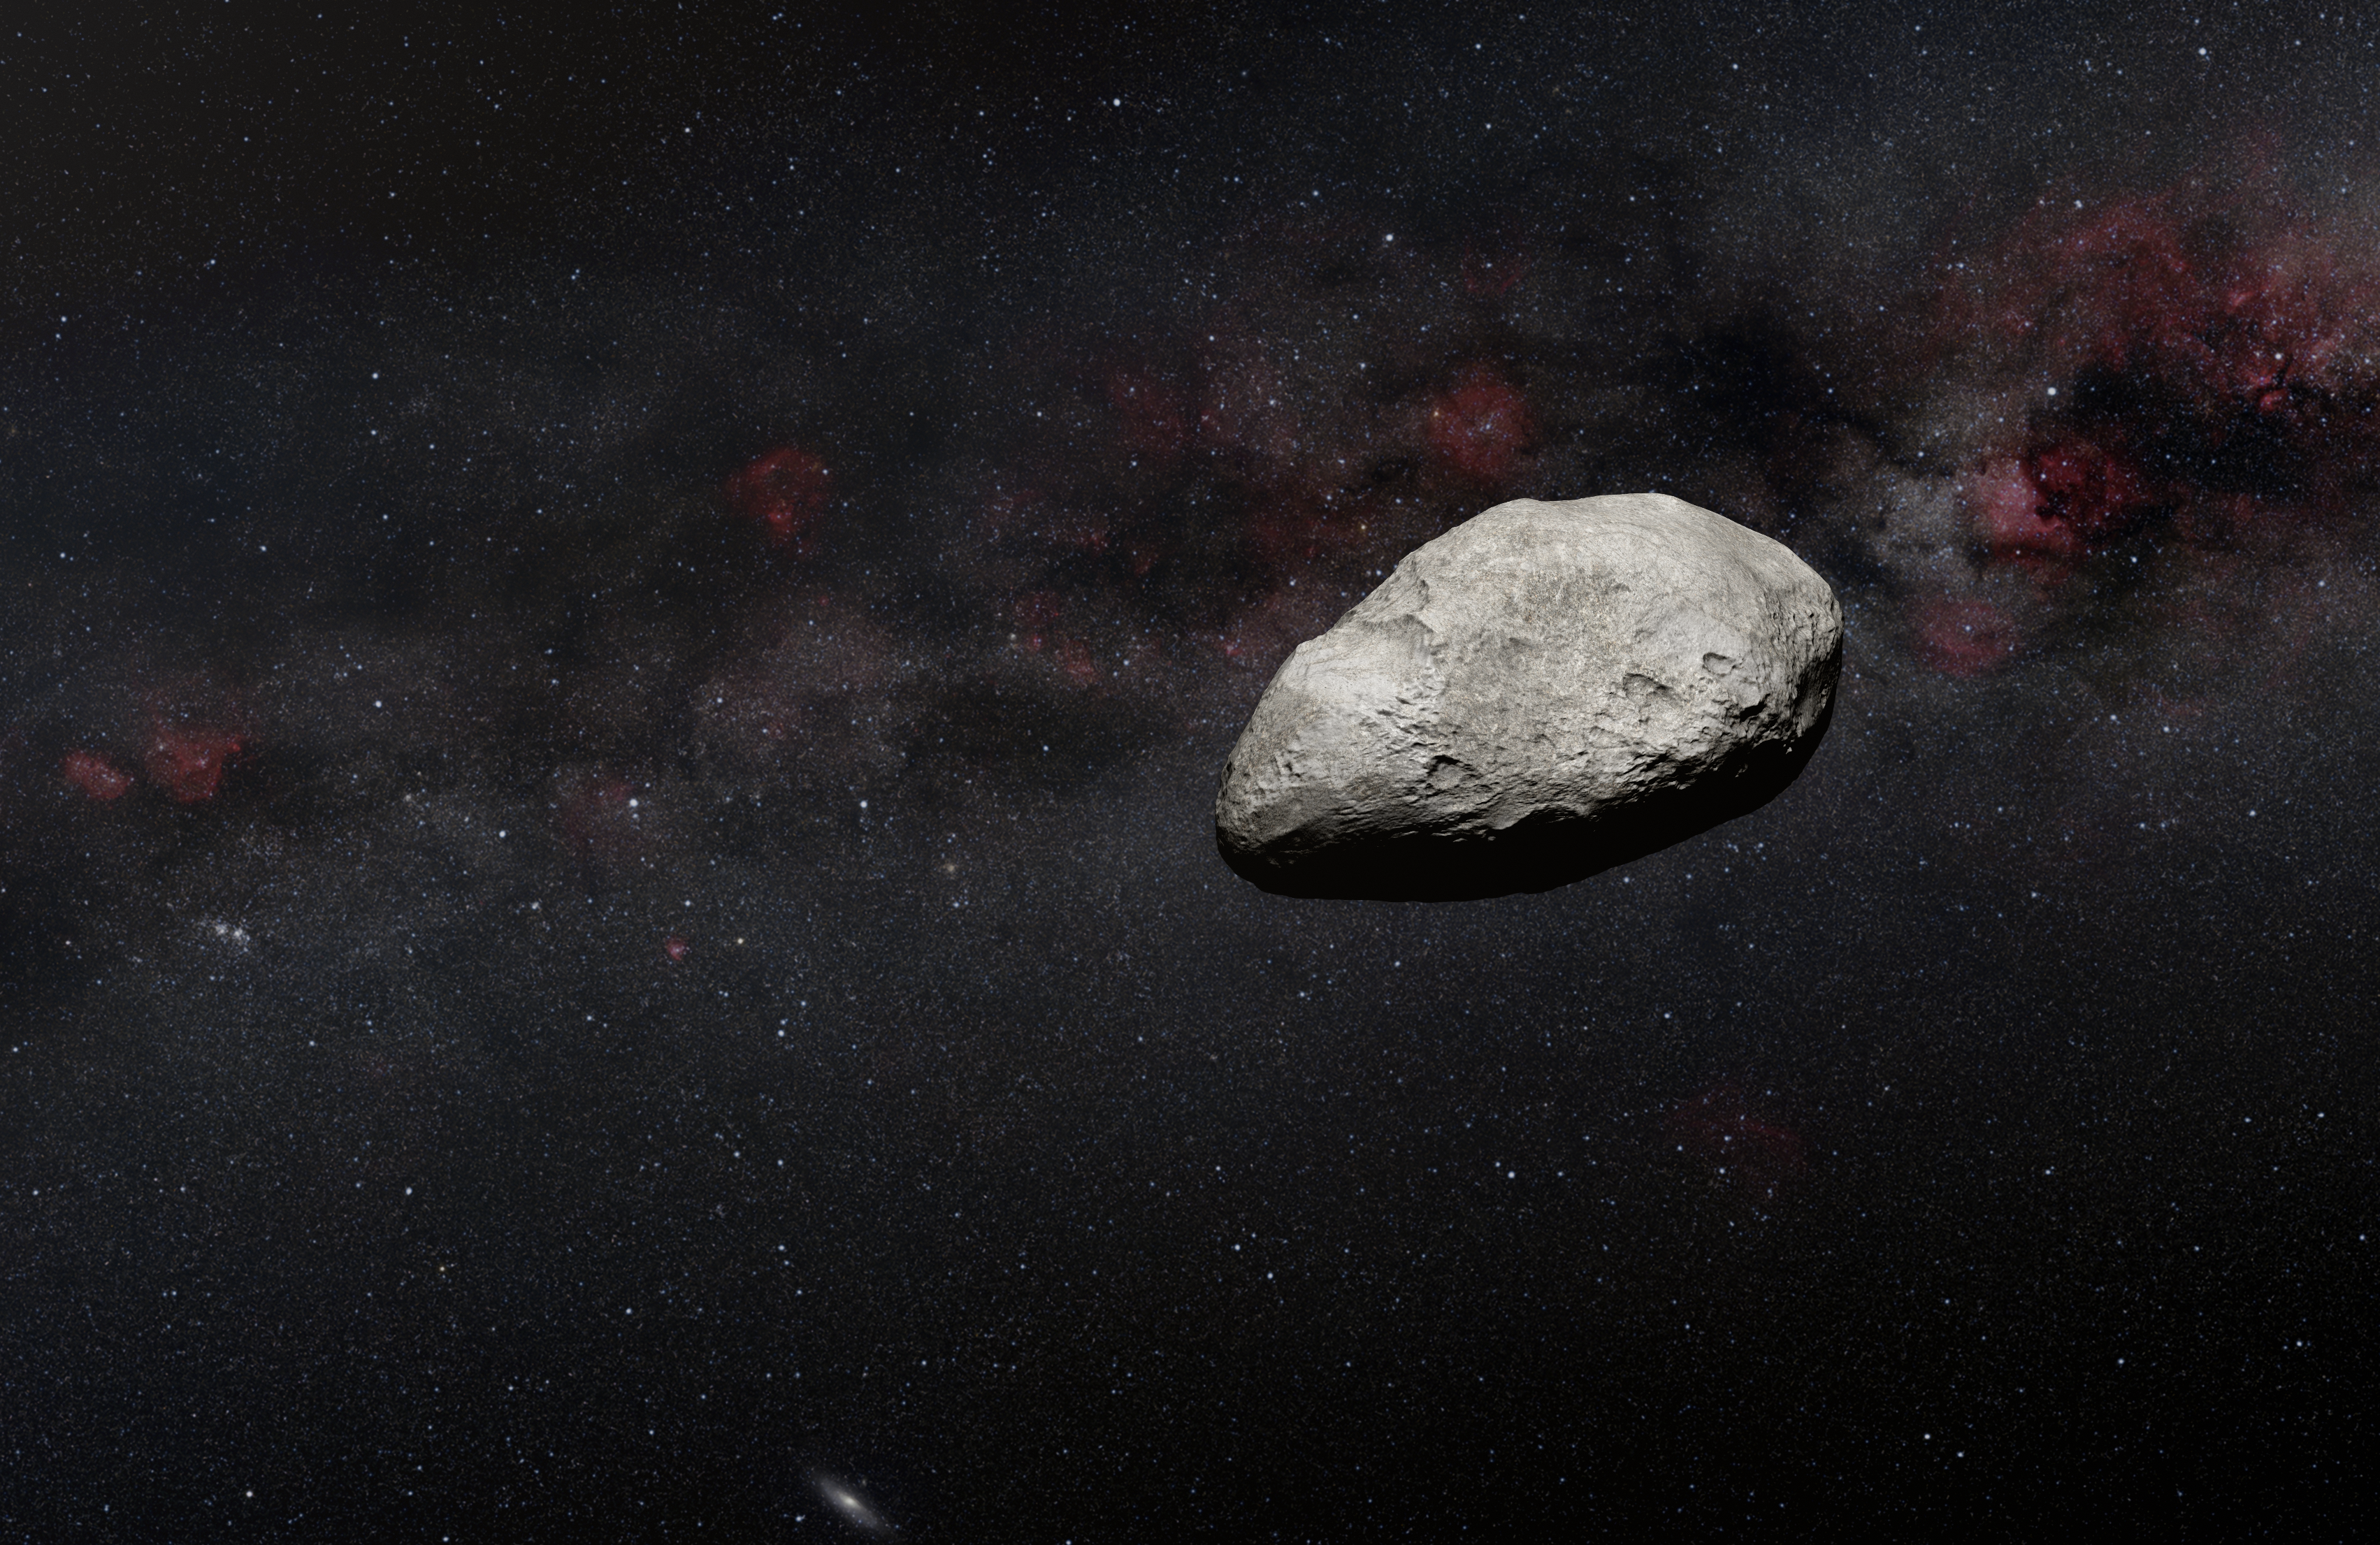

Illustration of Asteroid (Artist’s Impression)

A previously unknown 100–200-metre asteroid — roughly the size of Rome’s Colosseum — has been detected by an international team of European astronomers using the NASA/ESA/CSA James Webb Space Telescope. Their project used data from the calibration of the Mid-InfraRed Instrument (MIRI), in which the team serendipitously detected an interloping asteroid. The object is likely the smallest observed to date by Webb and may be an example of an object measuring under 1 kilometer in length within the main asteroid belt, located between Mars and Jupiter. More observations are needed to better characterize this object’s nature and properties.

Credit: N. Bartmann (ESA/Webb), ESO/M. Kornmesser and S. Brunier, N. Risinger (skysurvey.org)